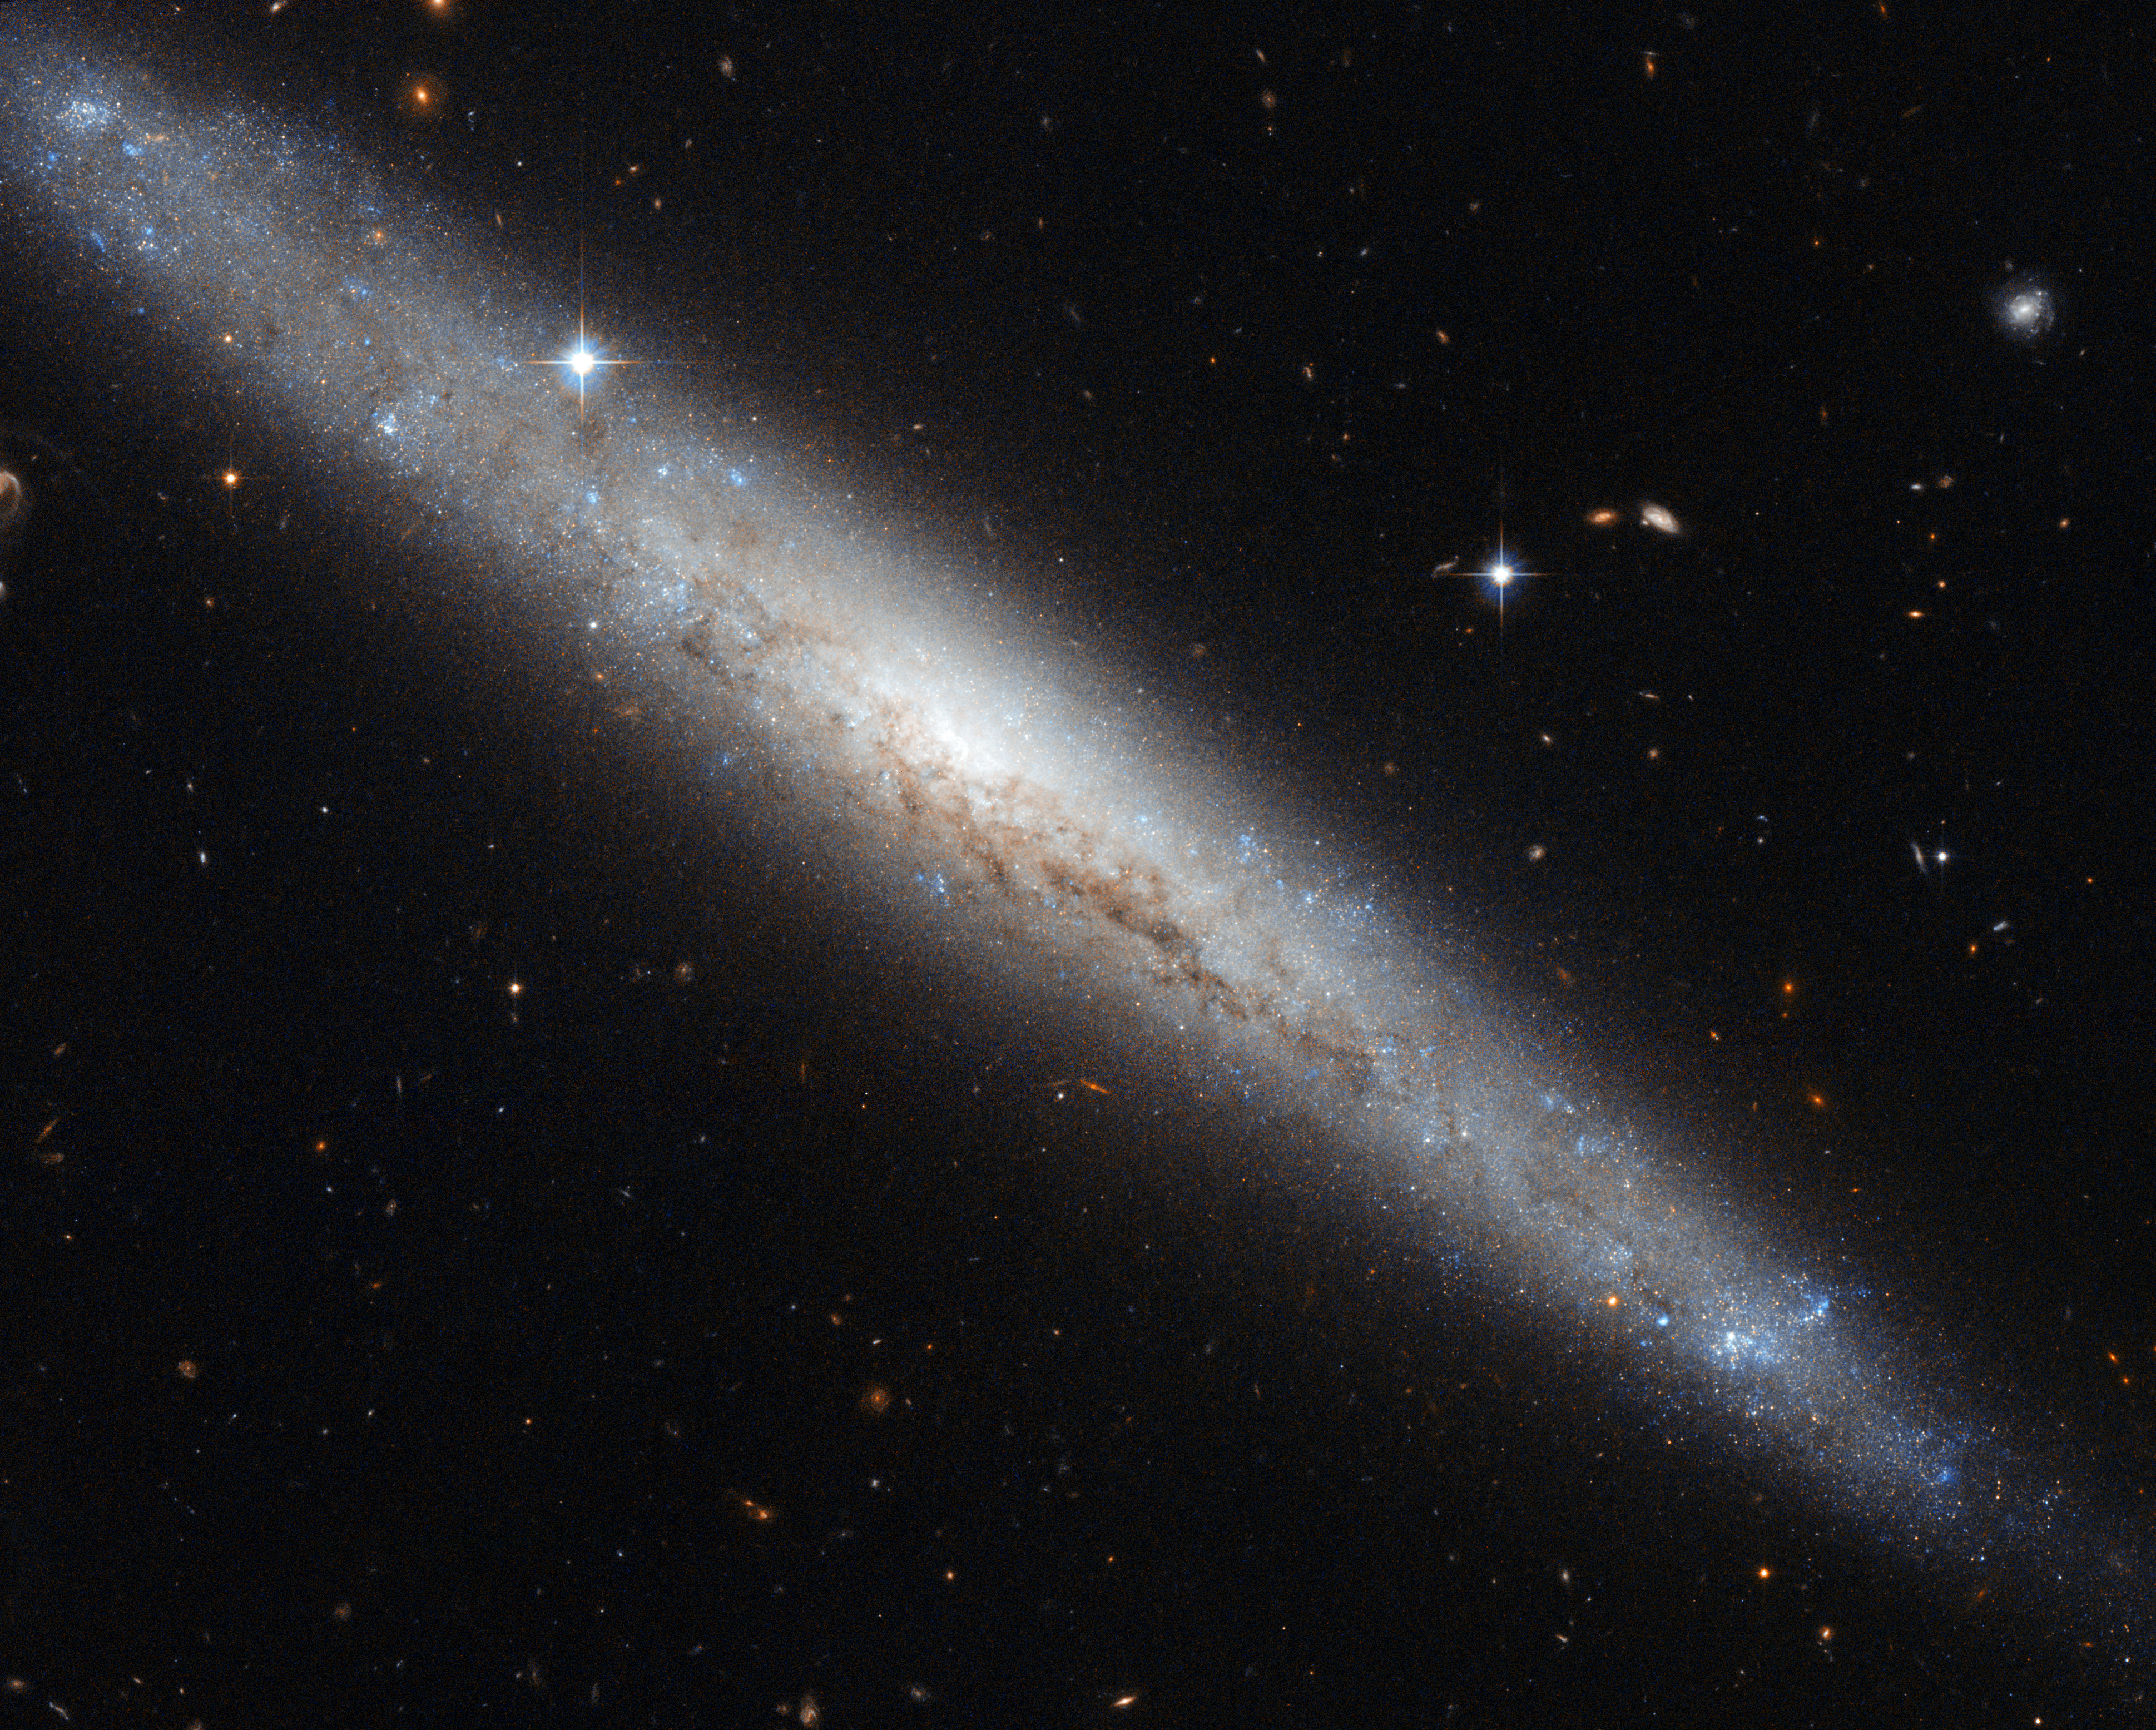

Hubble portrays a dusty spiral galaxy

The NASA/ESA Hubble Space Telescope has provided us with another outstanding image of a nearby galaxy. This week, we highlight the galaxy NGC 4183, seen here with a beautiful backdrop of distant galaxies and nearby stars. Located about 55 million light-years from the Sun and spanning about eighty thousand light-years, NGC 4183 is a little smaller than the Milky Way. This galaxy, which belongs to the Ursa Major Group, lies in the northern constellation of Canes Venatici (The Hunting Dogs).

NGC 4183 is a spiral galaxy with a faint core and an open spiral structure. Unfortunately, this galaxy is viewed edge-on from the Earth, and we cannot fully appreciate its spiral arms. But we can admire its galactic disc.

The discs of galaxies are mainly composed of gas, dust and stars. There is evidence of dust over the galactic plane, visible as dark intricate filaments that block the visible light from the core of the galaxy. In addition, recent studies suggest that this galaxy may have a bar structure. Galactic bars are thought to act as a mechanism that channels gas from the spiral arms to the centre, enhancing star formation, which is typically more pronounced in the spiral arms than in the bulge of the galaxy.

British astronomer William Herschel first observed NGC 4183 on 14 January 1778.

This picture was created from visible and infrared images taken with the Wide Field Channel of the Advanced Camera for Surveys. The field of view is approximately 3.4 arcminutes wide.

This image uses data identified by Luca Limatola in the Hubble's Hidden Treasures image processing competition.

Credit: ESA/Hubble & NASA. Acknowledgement: Luca Limatola